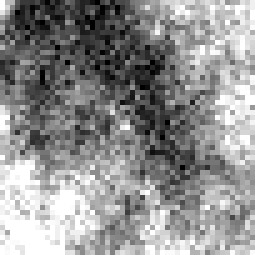

Cepheid 2 NGC 4603

Harvard Observatory astronomer Henrietta S. Leavitt makes the first crucial step in establishing the distances to nearby "spiral nebulae." Studying variable stars in the Magellanic Clouds, she discovers the presence of rhythmically pulsating stars, known as Cepheid variables, which brighten and dim over a period of days. By observing the relationship between a Cepheid's brightness and its pulsation rate, astronomers can calculate how much light it emits and then use that number to estimate its distance.

Credit: NASA & ESA